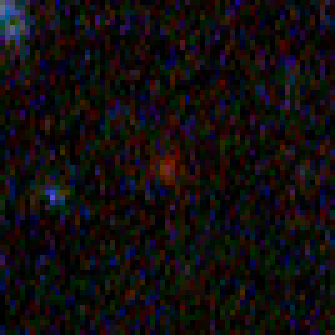

Hubble Building Blocks Galaxy at Redshift 5.76

Building block galaxy at redshift of 5.76 from Hubble Ultra Deep Field image.

Credit: NASA, ESA, and N. Pirzkal (European Space Agency/STScI)